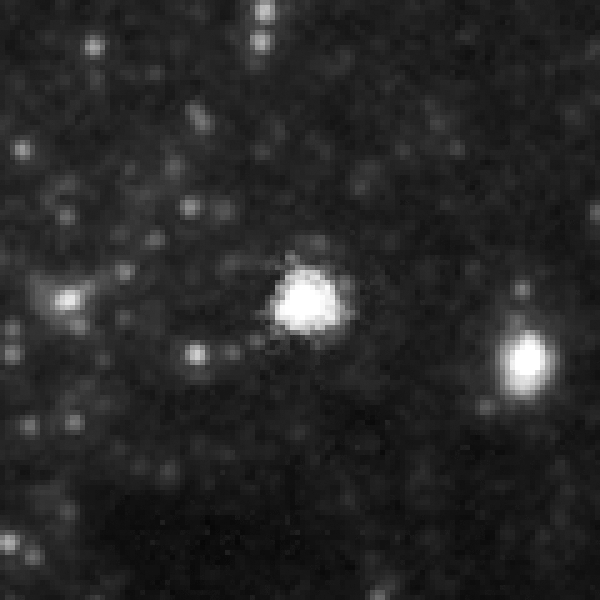

SN 2005cs in M51 - after progenitor star's explosion

In 2005 a supernova exploded in the galaxy M 51, which is also known as the Whirlpool Galaxy. The type II supernova occured in the inner spiral arm of the galaxy ans was observed by German amateur astronomers.

This picture taken by Hubble shows a closeup view of the supernova, which is visible in the center.

Credit: NASA, ESA, W. Li and A. Filippenko (University of California, Berkeley), S. Beckwith (STScI), and The Hubble Heritage Team (STScI/AURA)